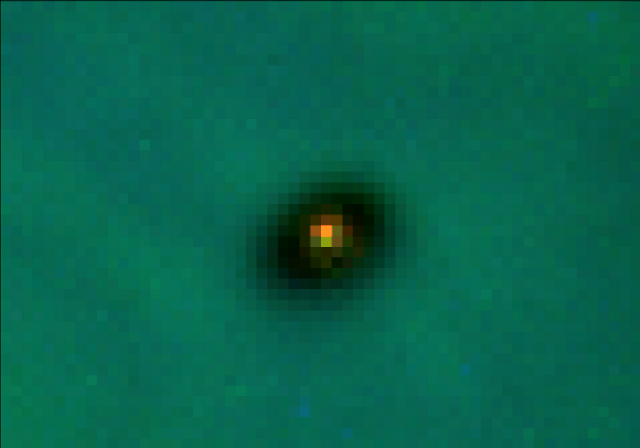

Protoplanetary Disc

A Hubble Space Telescope view of a very young star (between 300, 000 and a million years of age) surrounded by material left over from the star's formation. The cool, reddish star is about one fifth the mass of our Sun.

Credit: C.R. O'Dell/Rice University NASA/ESA